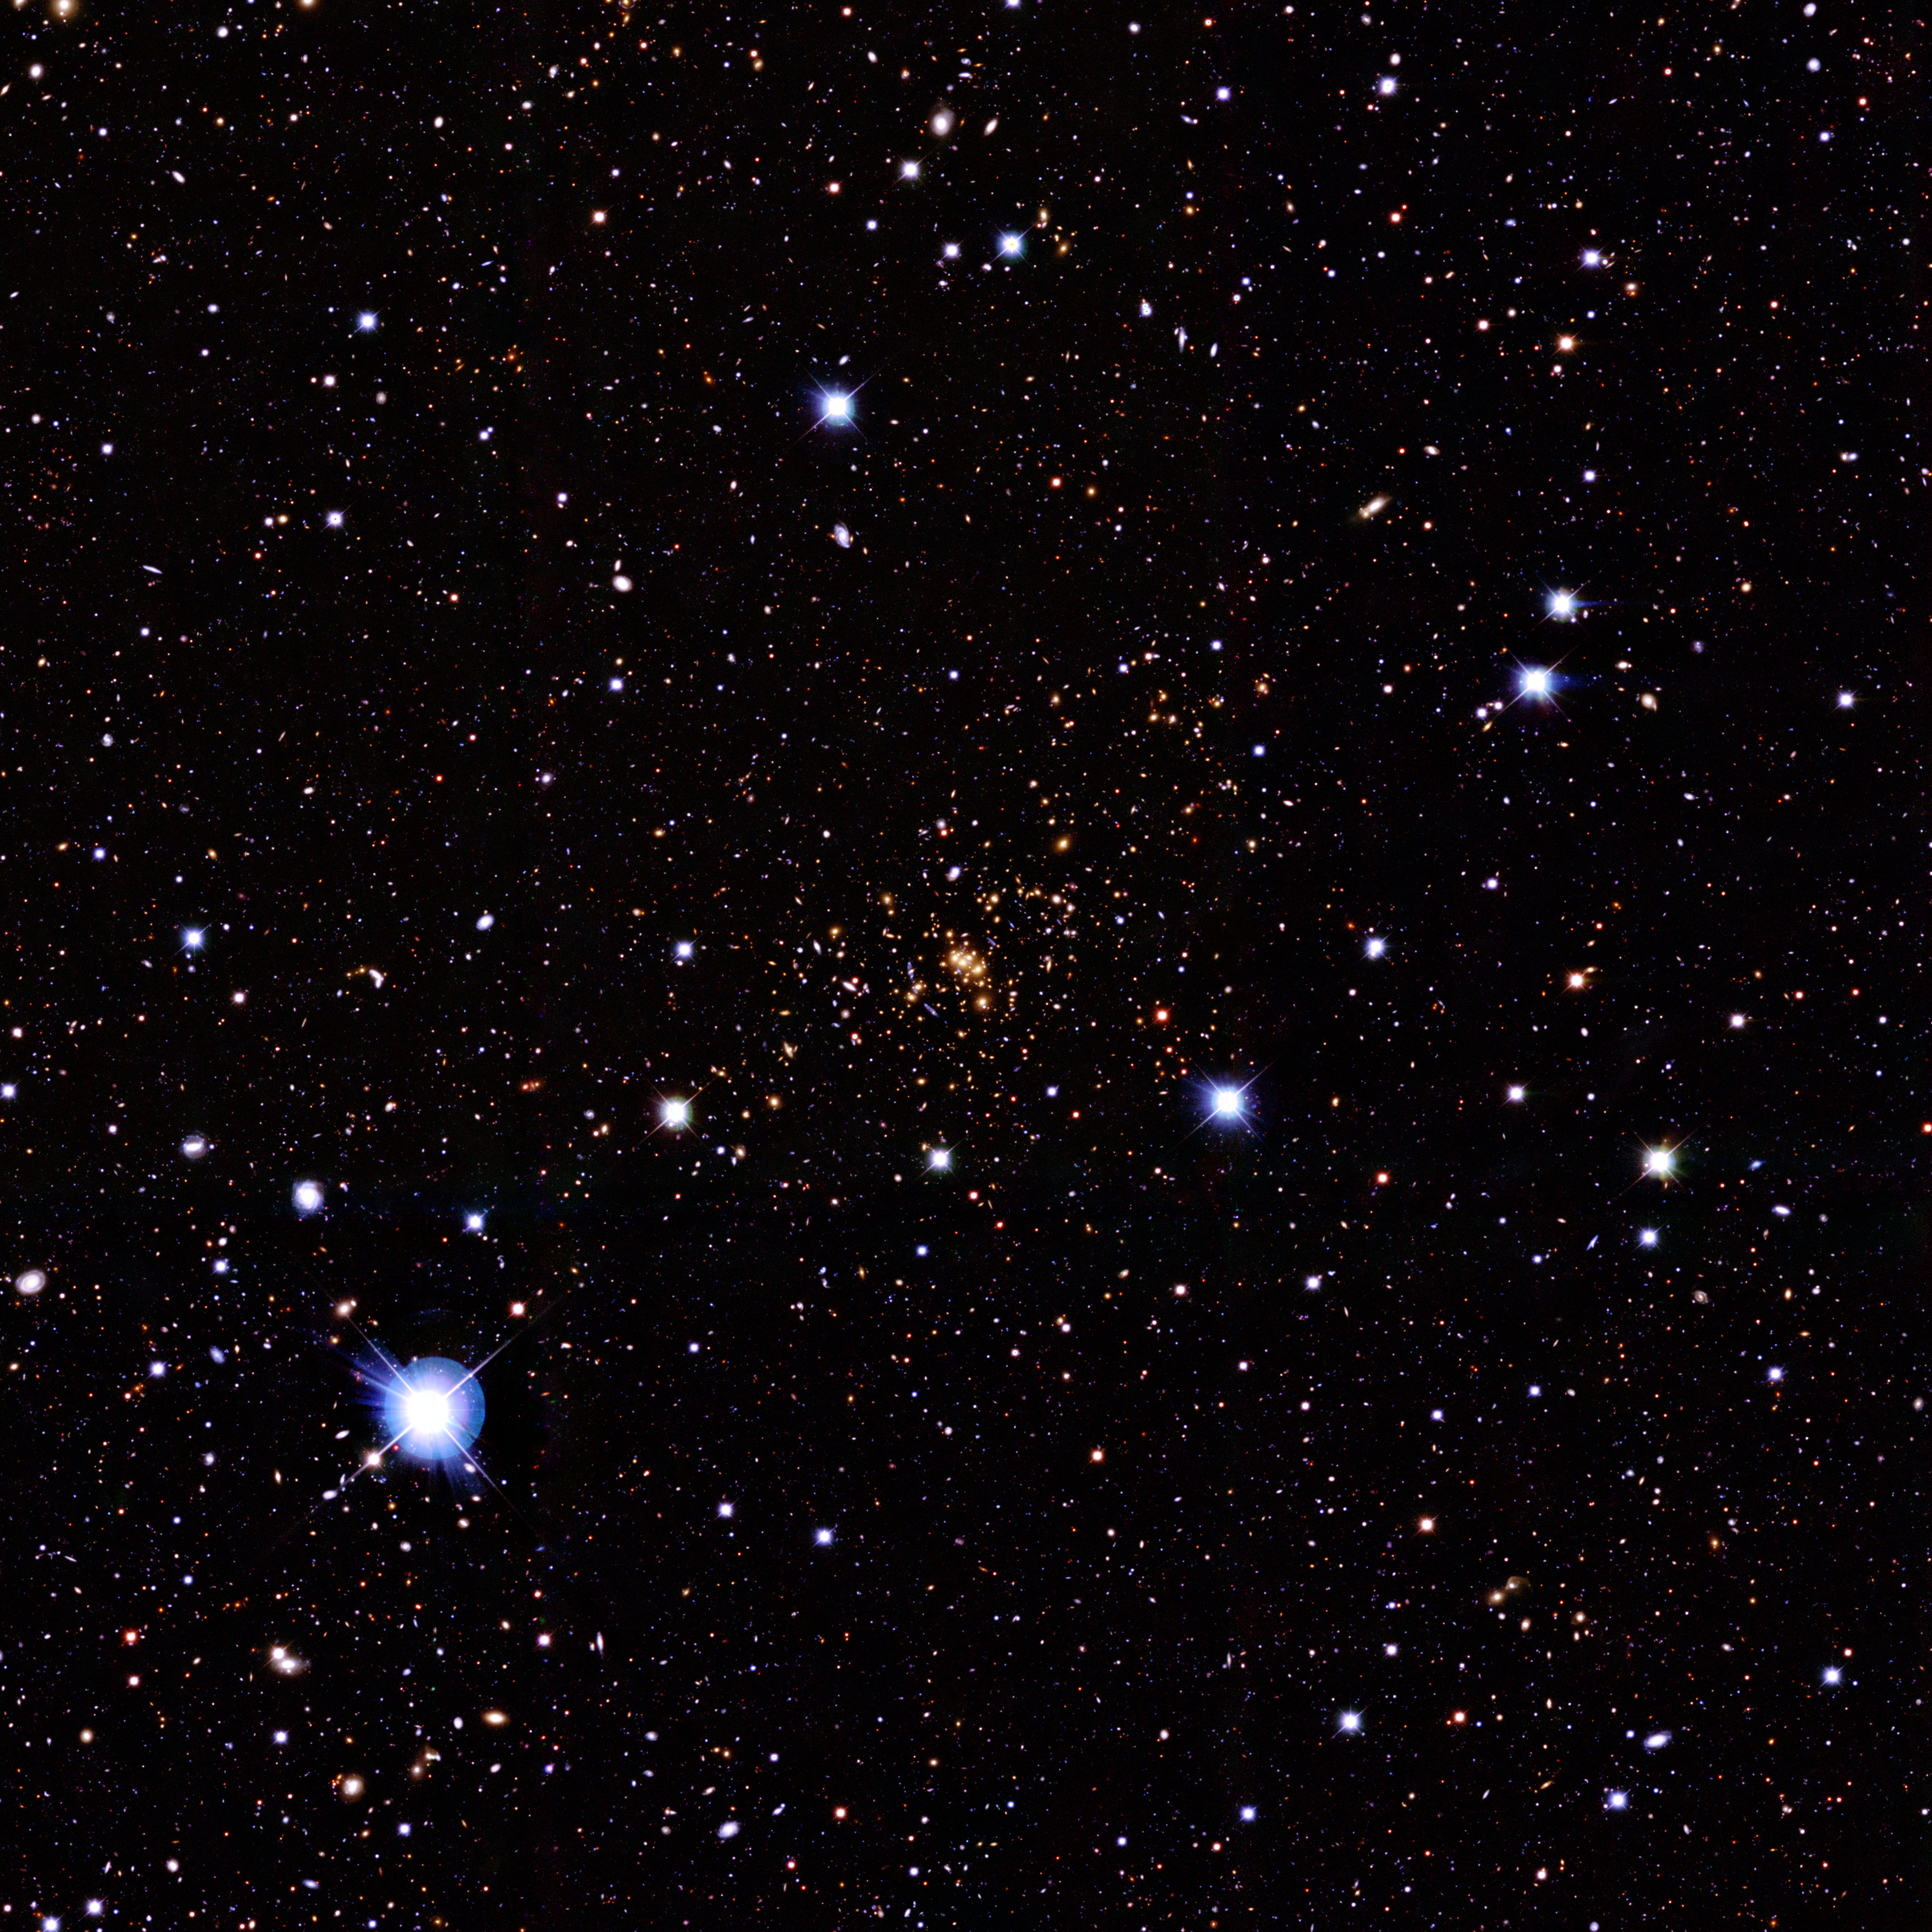

Ground-based image of the galaxy cluster CL0024+1654

This is a colour image of the galaxy cluster CL0024+1654 obtained with the CFHT12k camera at the Canada France Hawaii Telescope on Mauna Kea (Hawaii). The cluster clearly appears as a concentration of yellow galaxies in the centre of this image although cluster galaxies actually extend at least to the edge of this image. This image measures 21 x 21 arc-minutes.

Credit: European Space Agency, NASA, Jean-Paul Kneib (Observatoire Midi-Pyrénées, France/Caltech, USA) and the Canada France Hawaii Telescope